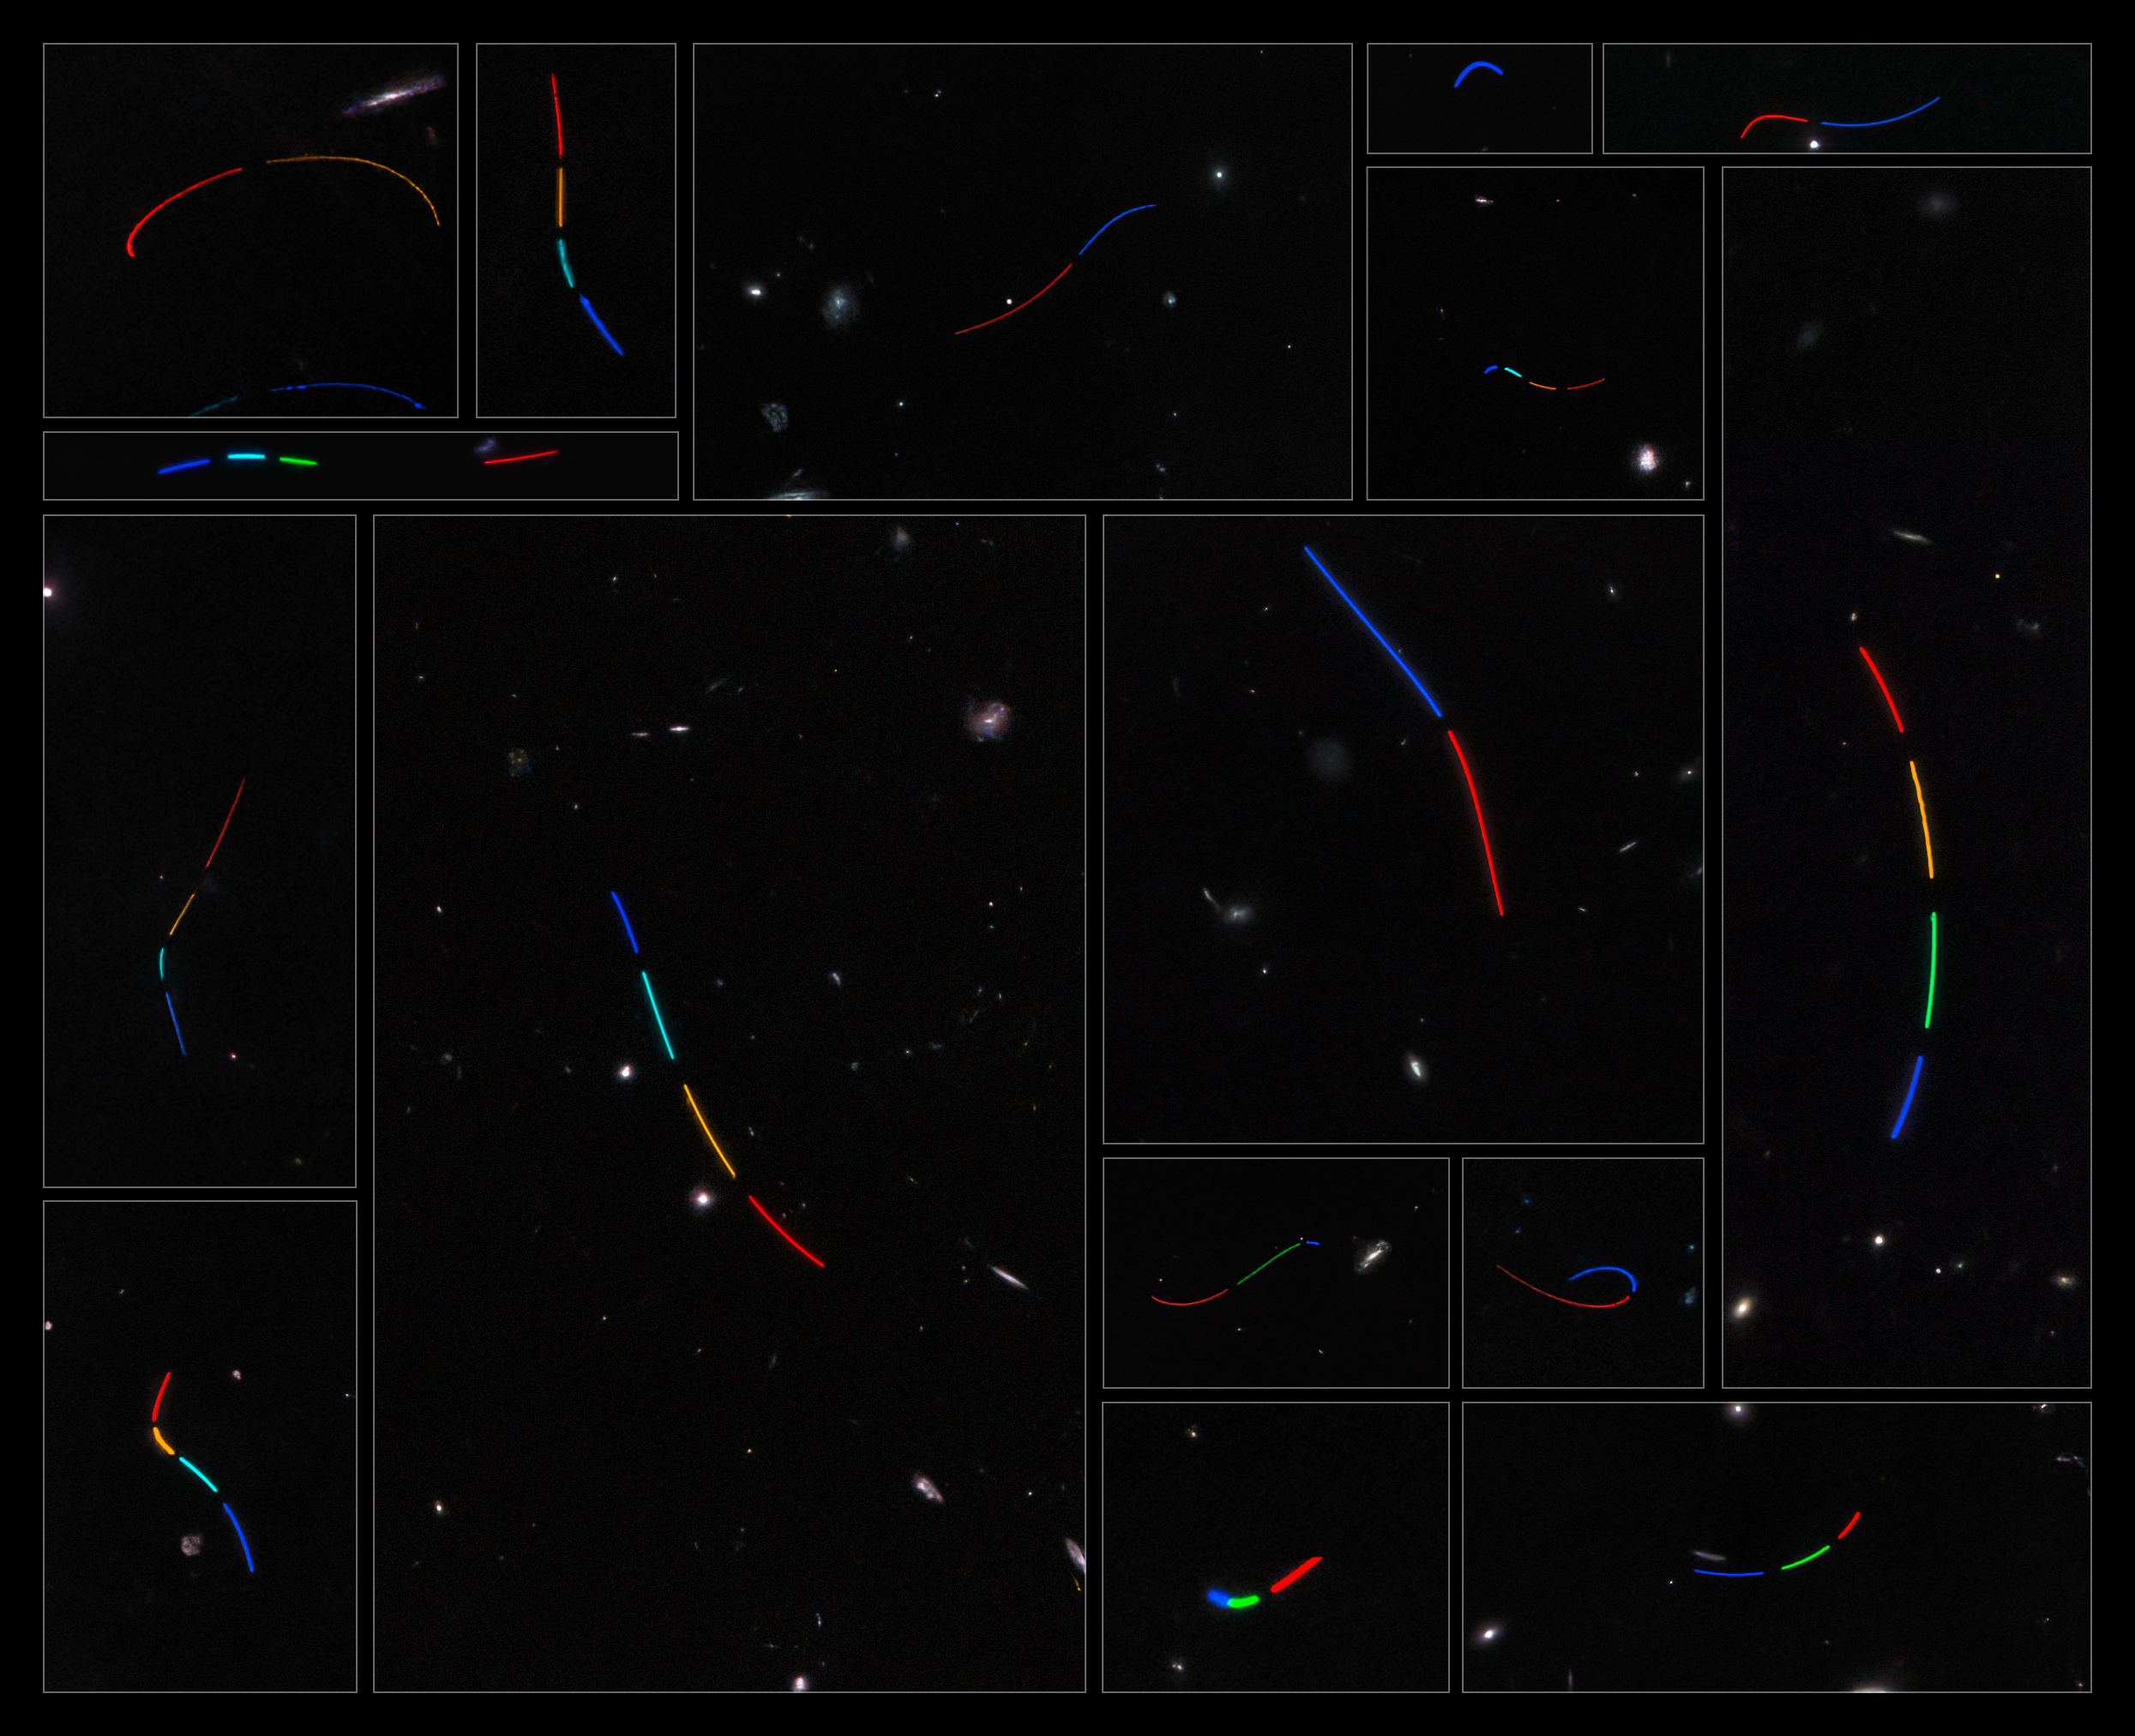

Asteroid Trails Mosaic

This mosaic consists of 16 different data sets from the NASA/ESA Hubble Space Telescope that were studied as part of the Asteroid Hunter citizen science project. Each of these datasets was assigned a colour based on the time sequence of exposures, such that the blue tones represent the first exposure in which the asteroid was captured and the red tones represent the last.

Credit: ESA/Hubble & NASA, S. Kruk (ESA/ESTEC), Hubble Asteroid Hunter citizen science team, M. Zamani (ESA/Hubble)